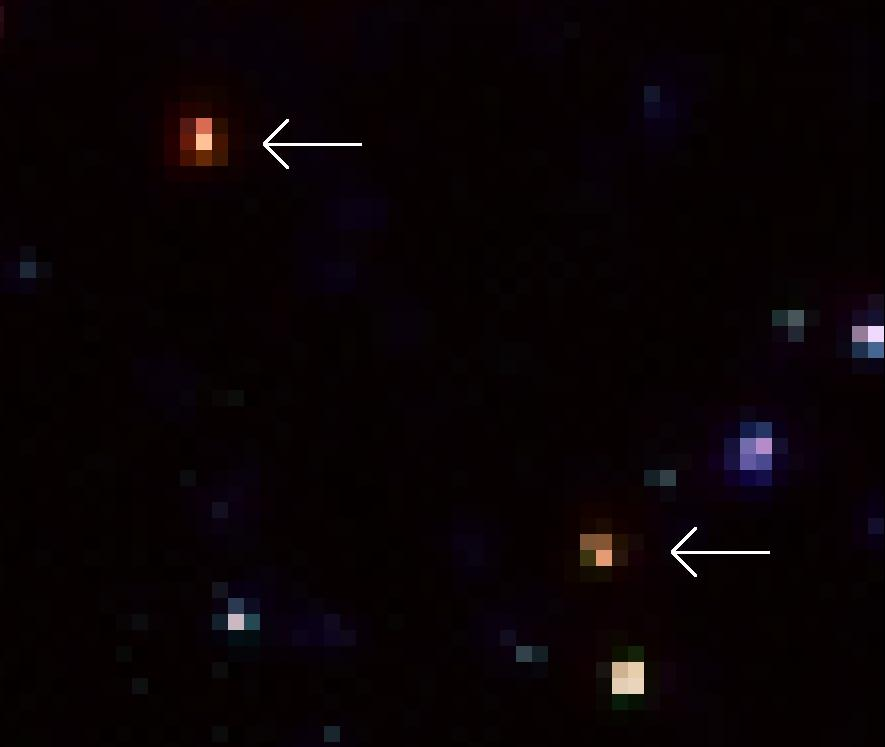

A close-up look of two of the extremely red galaxies revealed By Spitzer

A close-up look of two of the extremely red galaxies revealed by Spitzer. While they are very faint (the bottom one) or even completely invisible (the top one) in the deepest-ever optical images obtained by Hubble, Spitzer easily picked them up because of their strong infrared emissions. Astronomers believe these galaxies are so red because they are very old, possibly as old as the Universe was - about 2 billion years - at the time when these galaxies emitted the lights that Spitzer received today.

Credit: NASA, ESA, A. M. Koekemoer (STScI), M. Dickinson (NOAO) and The GOODS Team